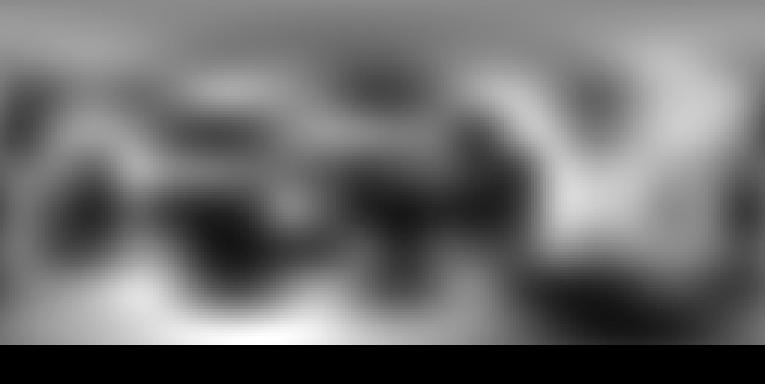

1994 Hubble photo map of Pluto (Faint Object Camera)

This photo map of Pluto was taken in 1994 by the European Space Agency's Faint Object Camera.

Credit: NASA, ESA and M. Buie (Southwest Research Institute)